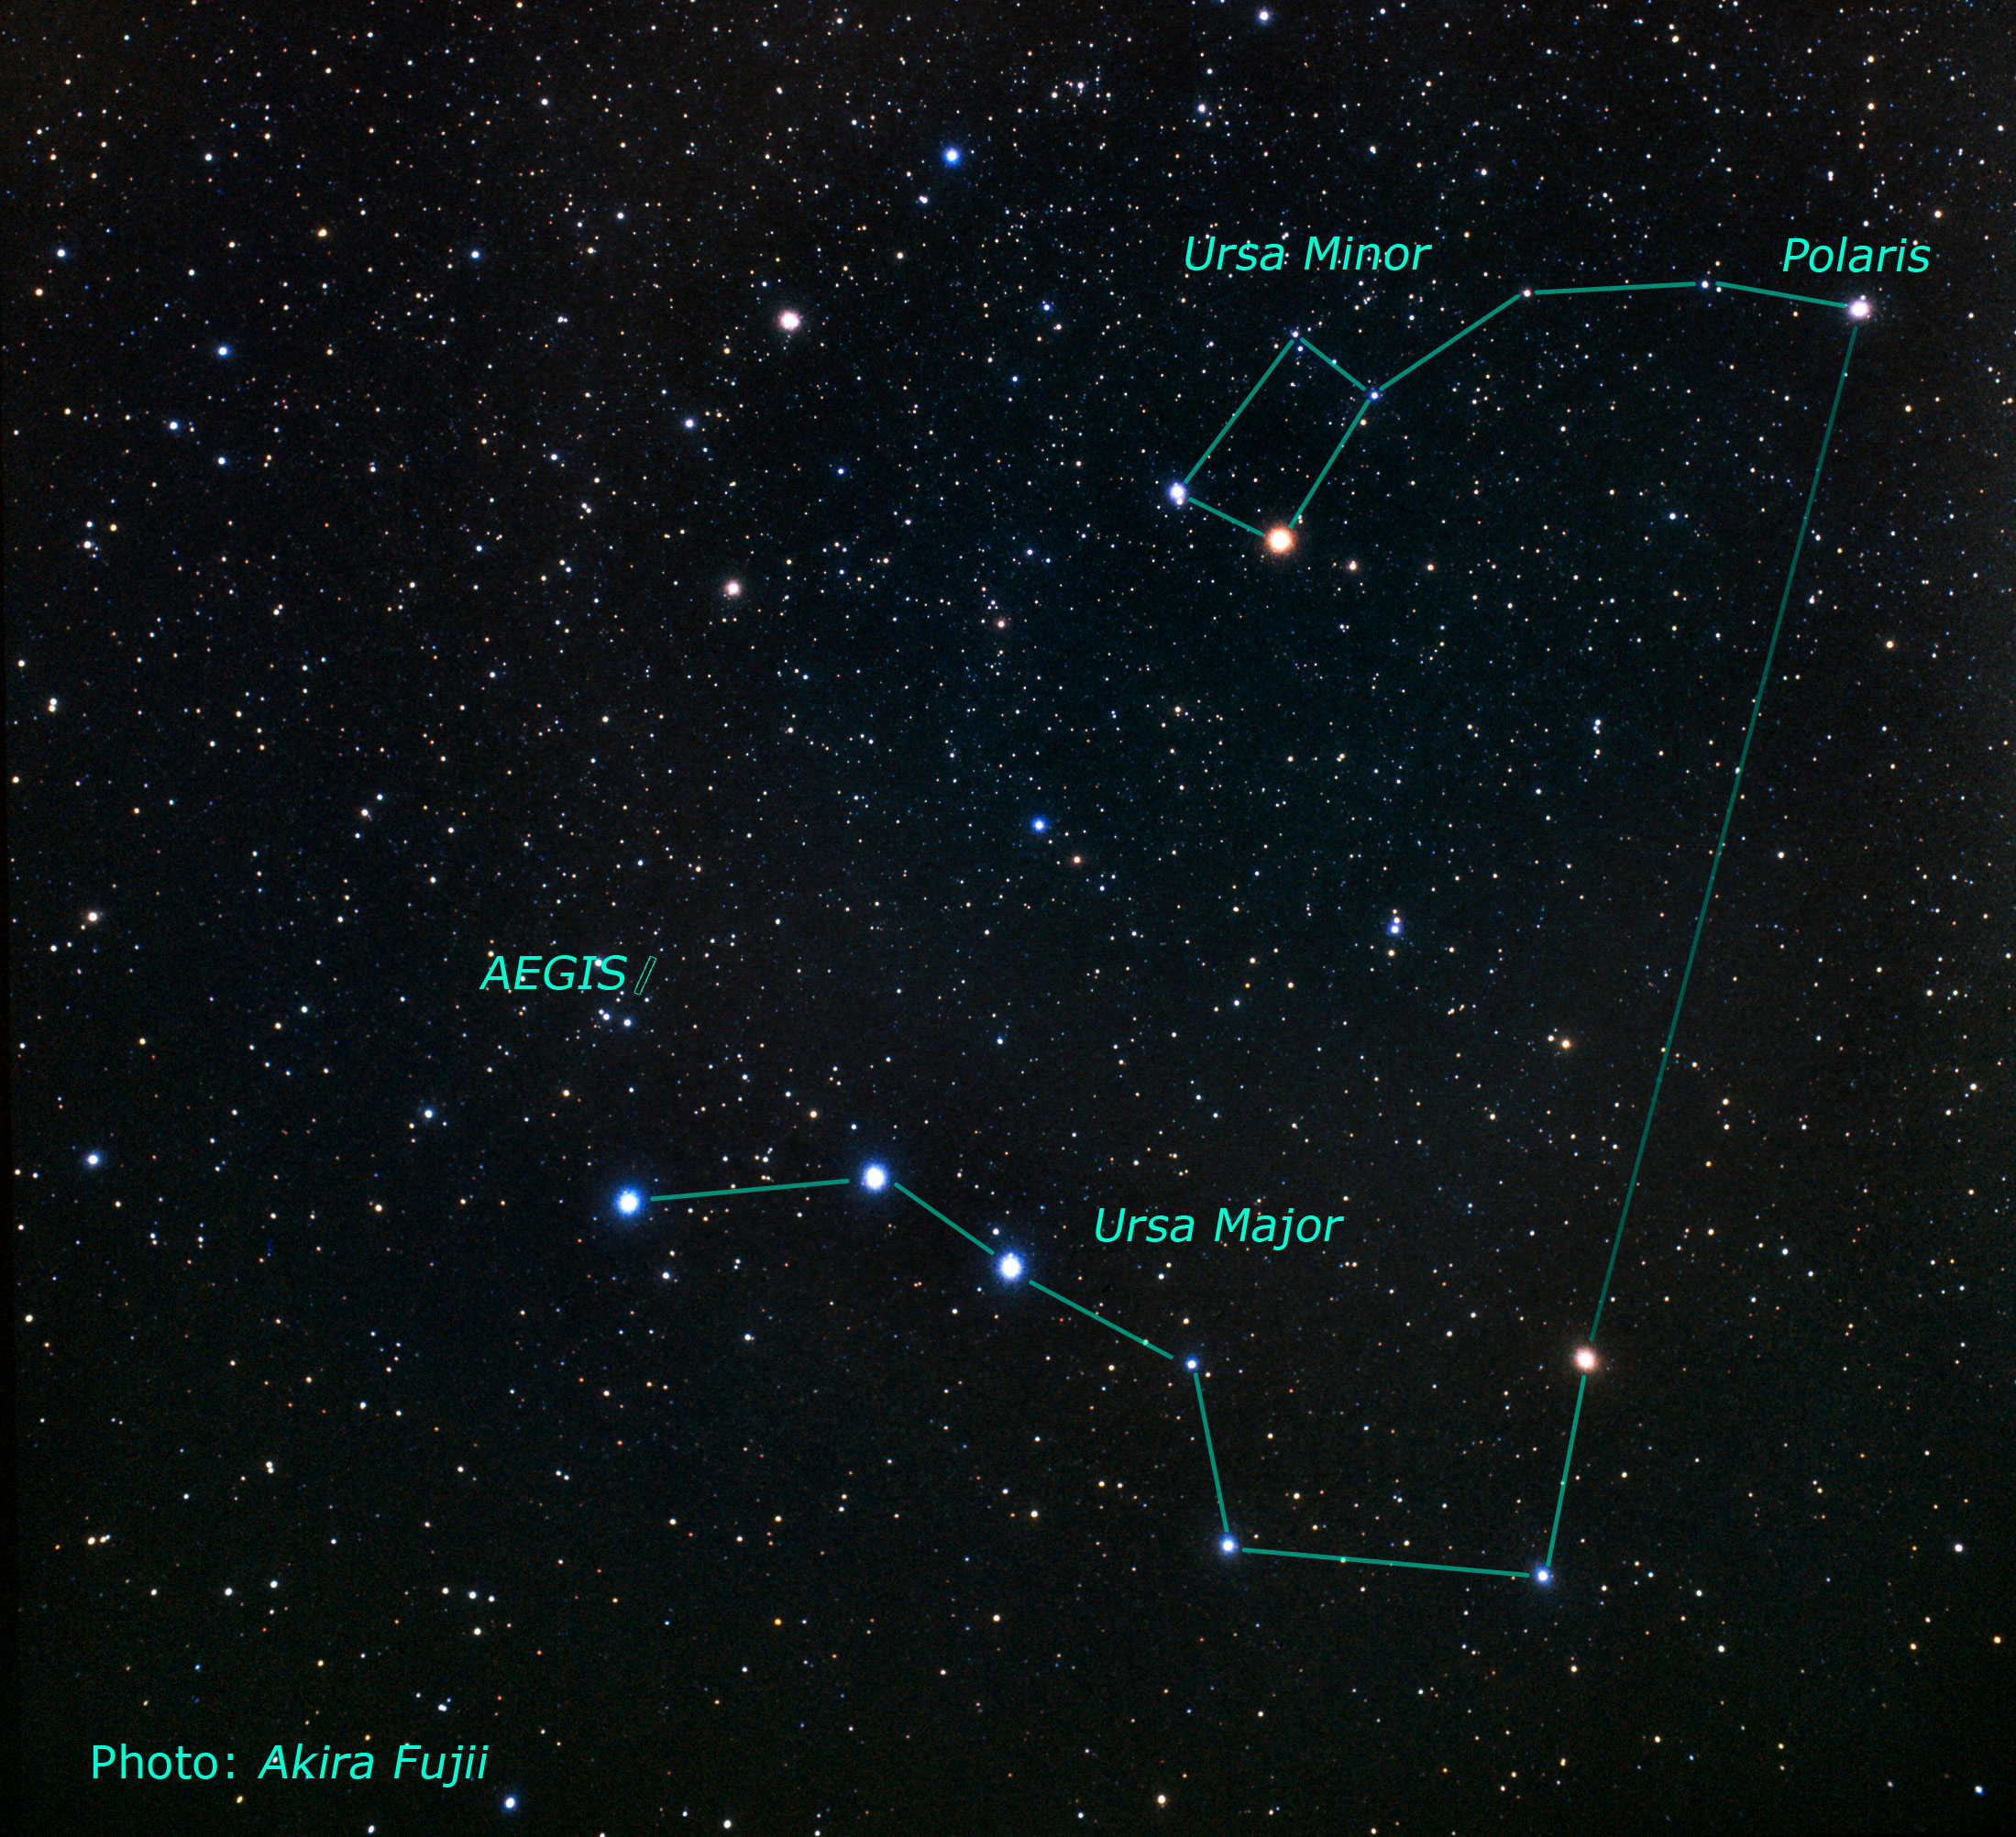

Location of the EGS Field on the Sky

This picture shows the position and the size of the EGS field on the sky. For orientation the constellations of Ursa Major, Ursa Minor and Polaris are given.

The Extended Groth Strip (EGS) is studied in the All-Wavelength Extended Groth Strip International Survey (AEGIS). This survey is observing the same area of the sky using the world's most powerful telescopes on the ground and in space, including the NASA/ESA Hubble Space Telescope. The aim of AEGIS is to study the properties of galaxies over the last half of the Hubble time by using both deep imaging covering all major wavebands from X-ray to radio and optical spectroscopy over a large area of sky.

Credit: NASA/ESA, The Hubble Heritage Team and A. Riess (STScI)